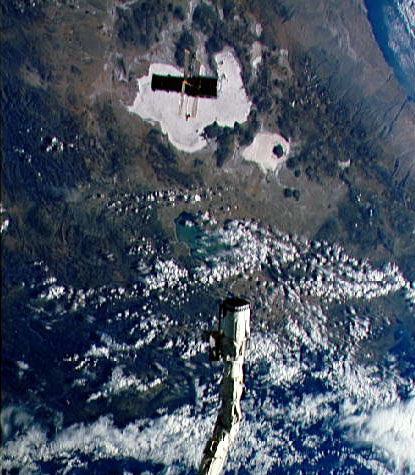

Deployment of the Hubble Space Telescope

This image was taken right after deployment of the Hubble Space Telescope

Credit: NASA & ESA